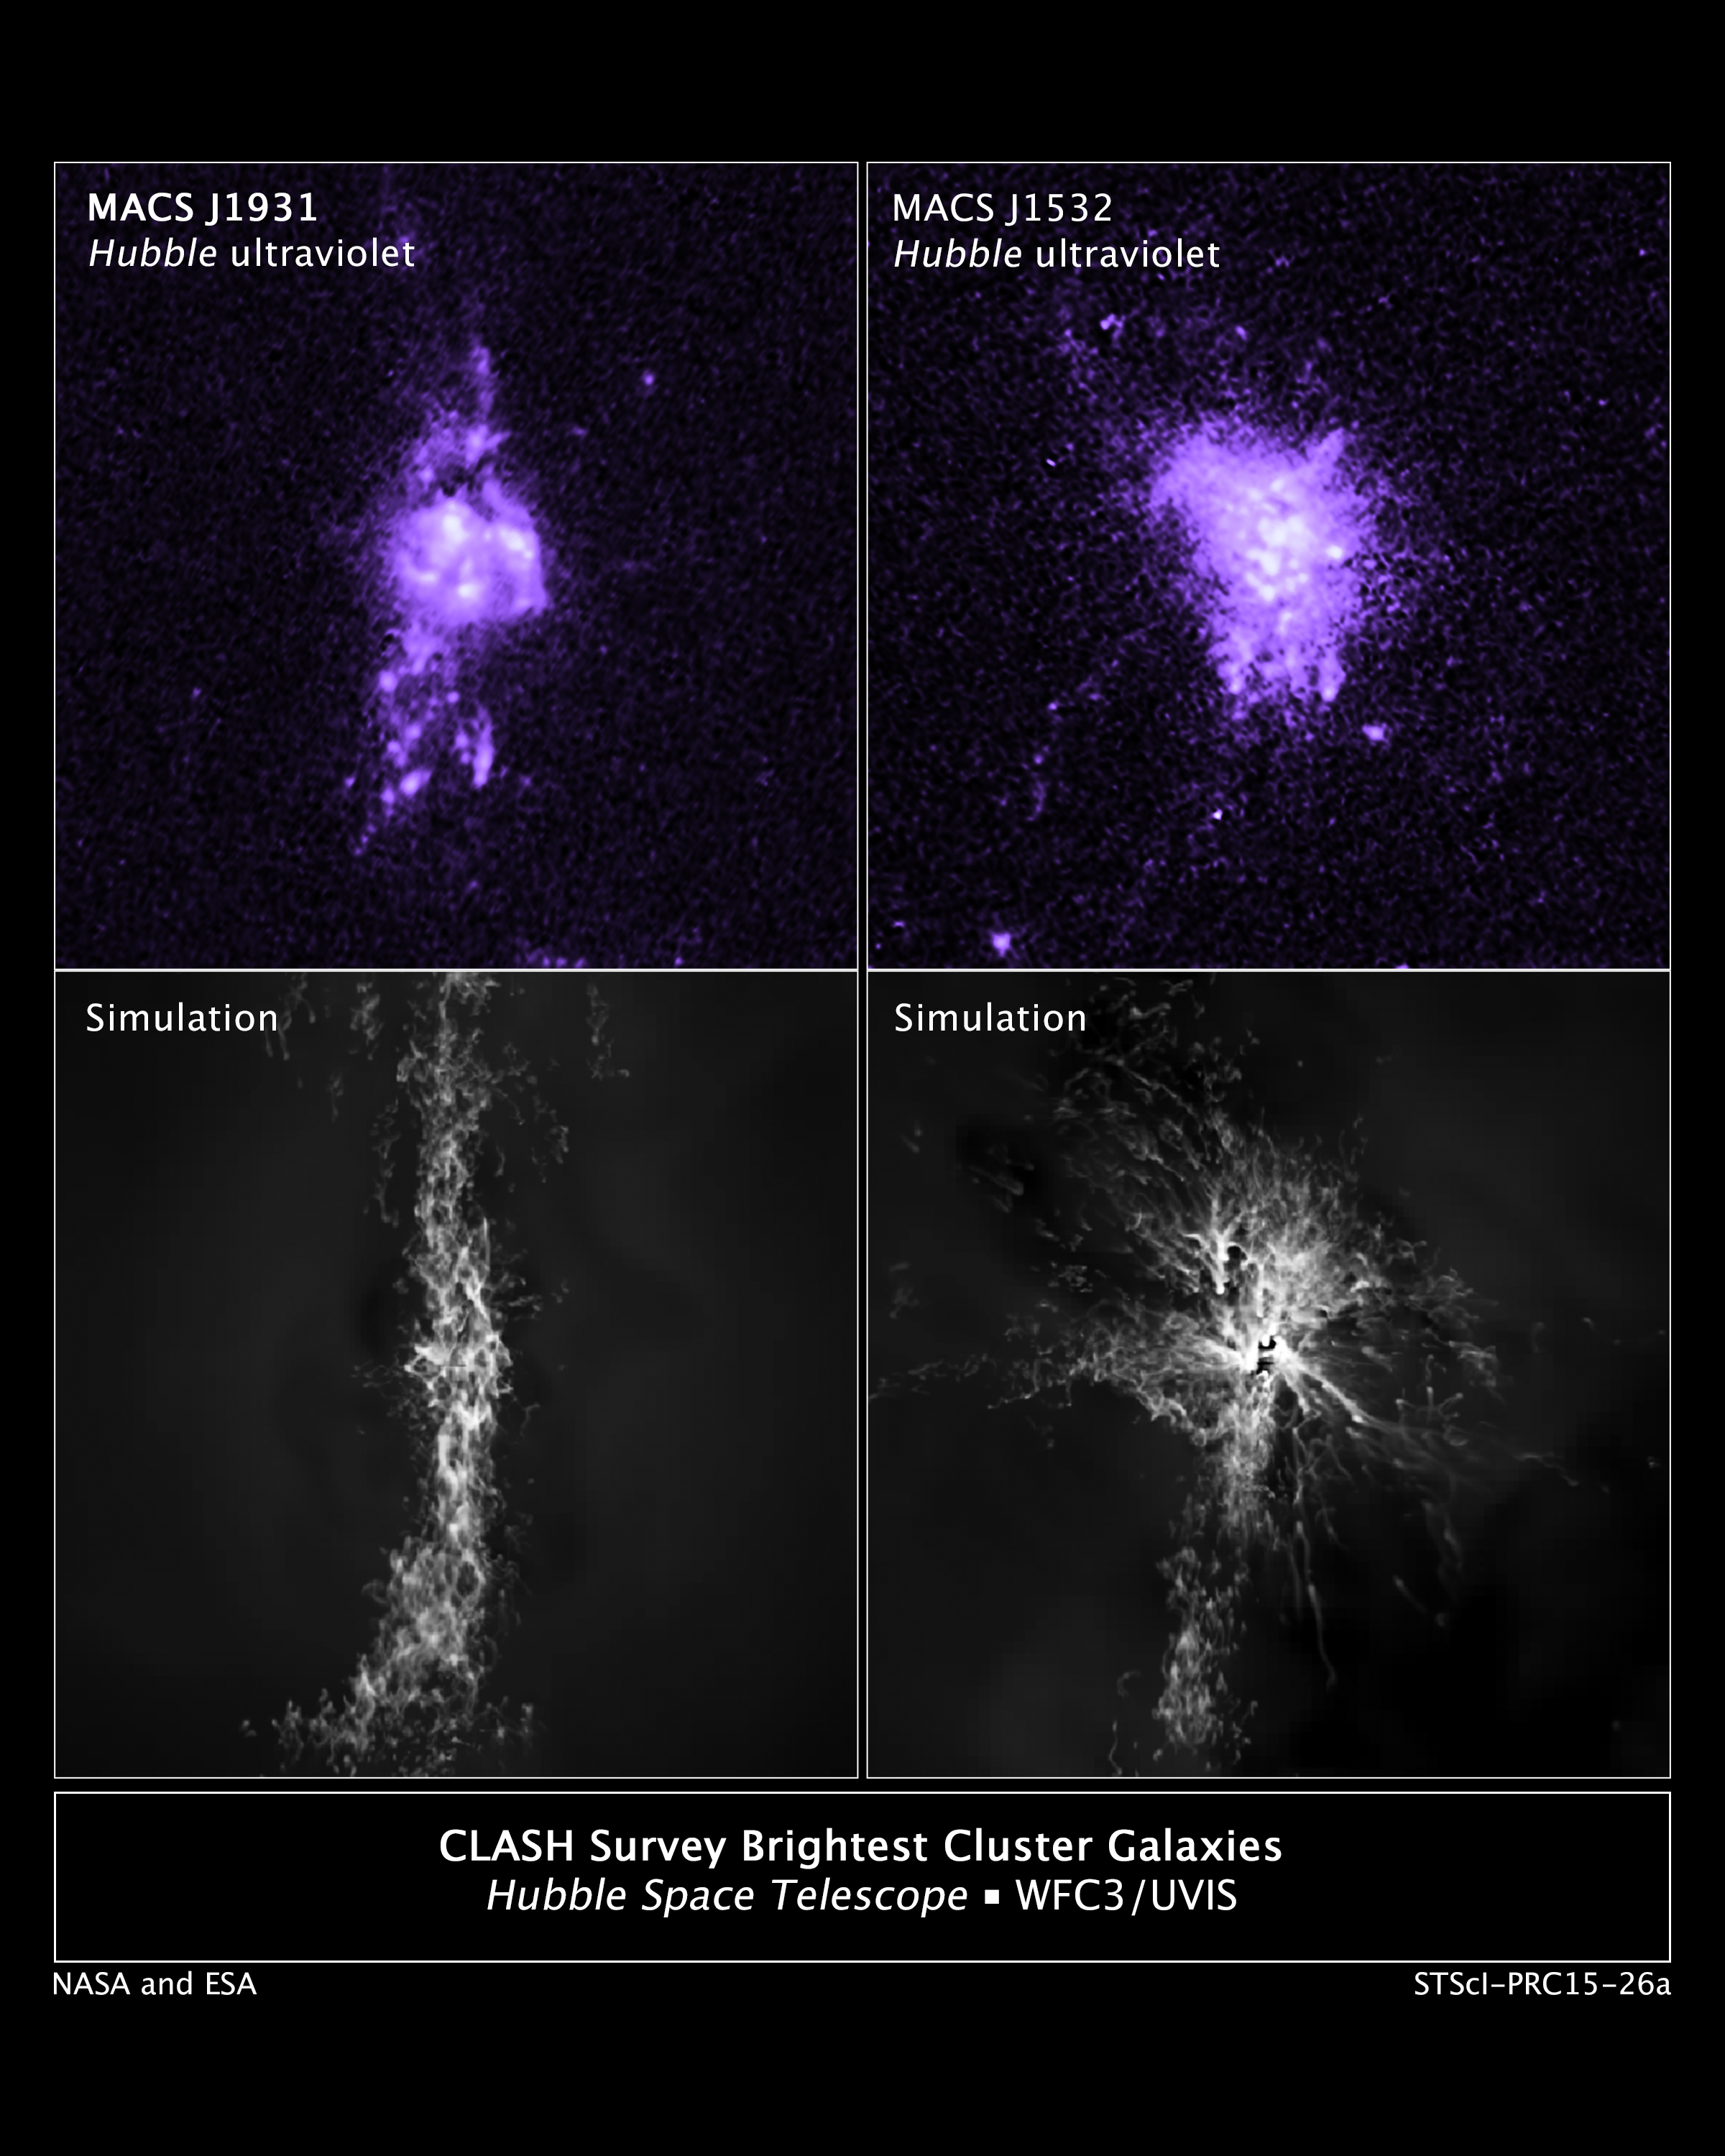

CLASH Survey Brightest Cluster Galaxies and Simulations

In this comparison of actual observations with simulations, the top images show Hubble observations of the density of gas in the central portion of two galaxies.The bottom images are computer simulations that are remarkably similar to the Hubble observations. Knots of star formation in the two galaxies show how gas falling into a galaxy’s center is controlled by jets from the central black hole.

Credit: NASA, ESA, M. Donahue (Michigan State University), and Y. Li (University of Michigan)